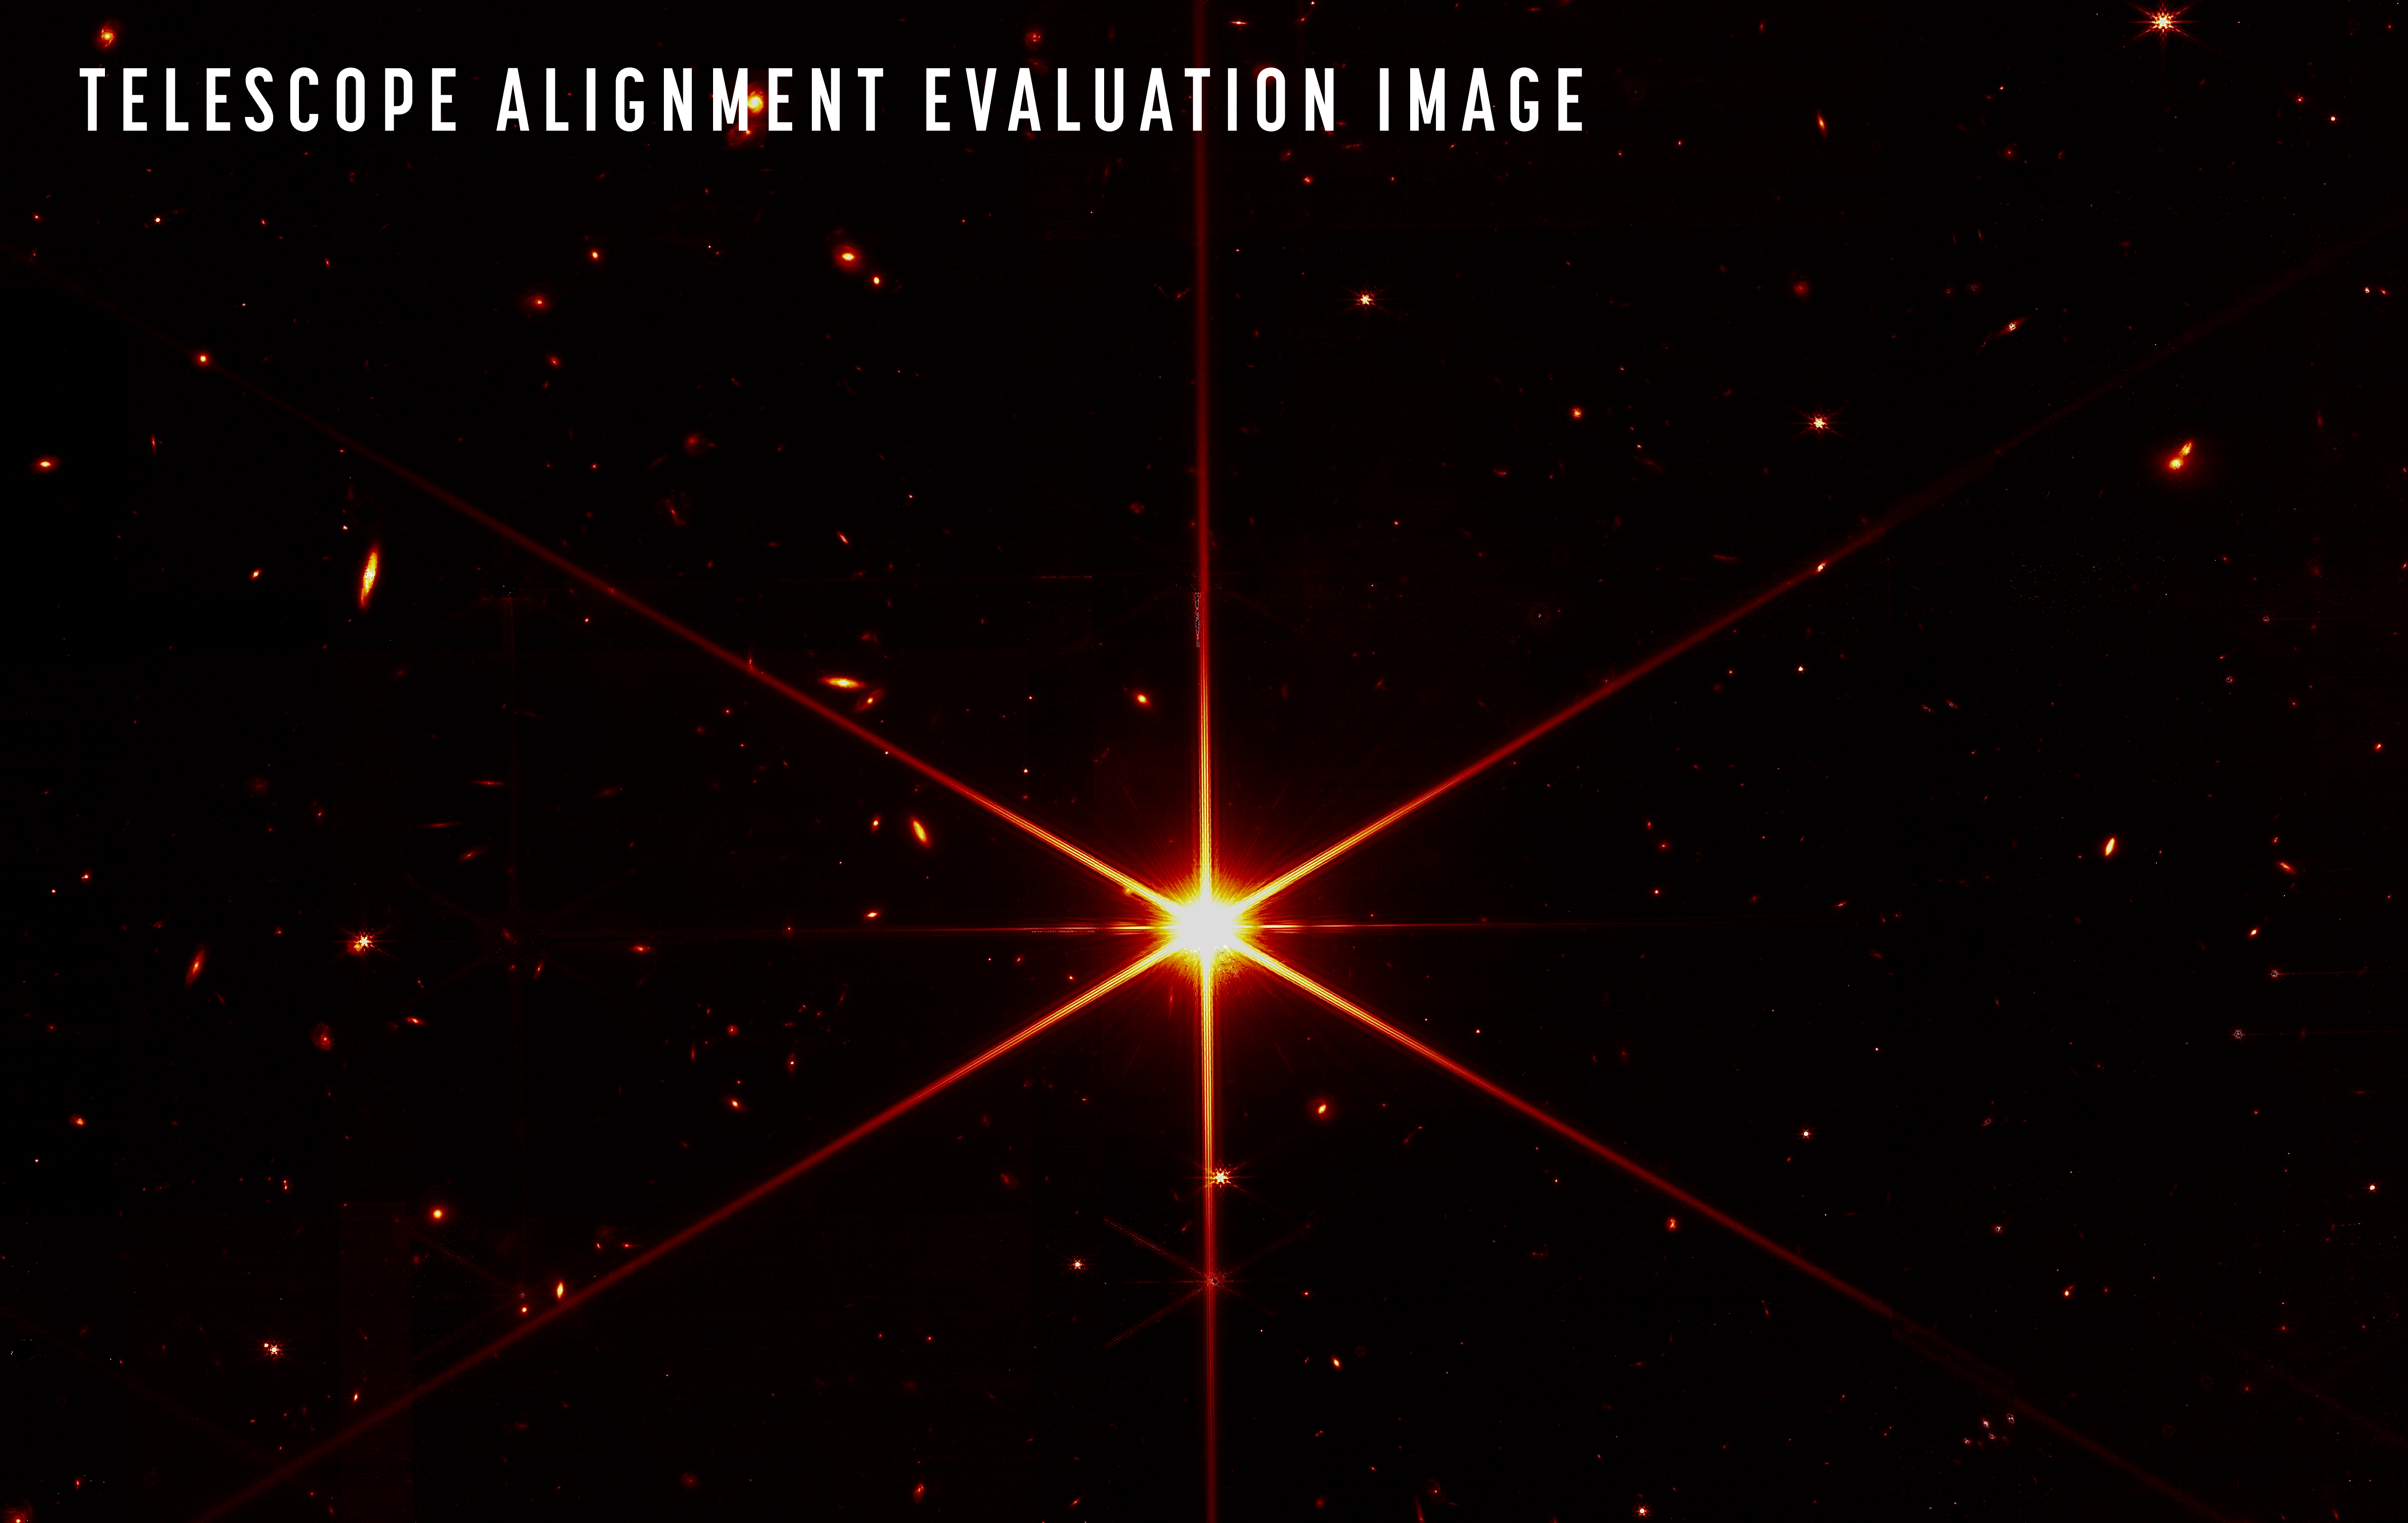

Webb's First Image of Focused Star

On 11 March 2022, the NASA/ESA/CSA James Webb Space Telescope (Webb) team completed the stage of mirror alignment known as "fine phasing". Although there are months to go before Webb ultimately delivers its new view of the cosmos, achieving this milestone means the team is confident that Webb’s first-of-its-kind optical system is working as well as possible.

At this key stage in the commissioning of Webb’s Optical Telescope Element, every optical parameter that has been checked and tested is performing at, or above, expectations. The team also found no critical issues and no measurable contamination or blockages to Webb’s optical path: the observatory is able to successfully gather light from distant objects and deliver it to its instruments without issue. At this stage of Webb’s mirror alignment, each of the primary mirror segments has been adjusted to produce one unified image of the same star using only Webb’s primary imager, the Near-Infrared Camera (NIRCam), and NIRCam has been fully aligned to the observatory's mirrors.

While the purpose of this image was to focus on the bright star at the centre (called 2MASS J17554042+6551277) for alignment evaluation, Webb's optics and NIRCam are so sensitive that galaxies and stars in the background also show up. This image uses a red filter to optimise visual contrast.

Credit: NASA/STScI